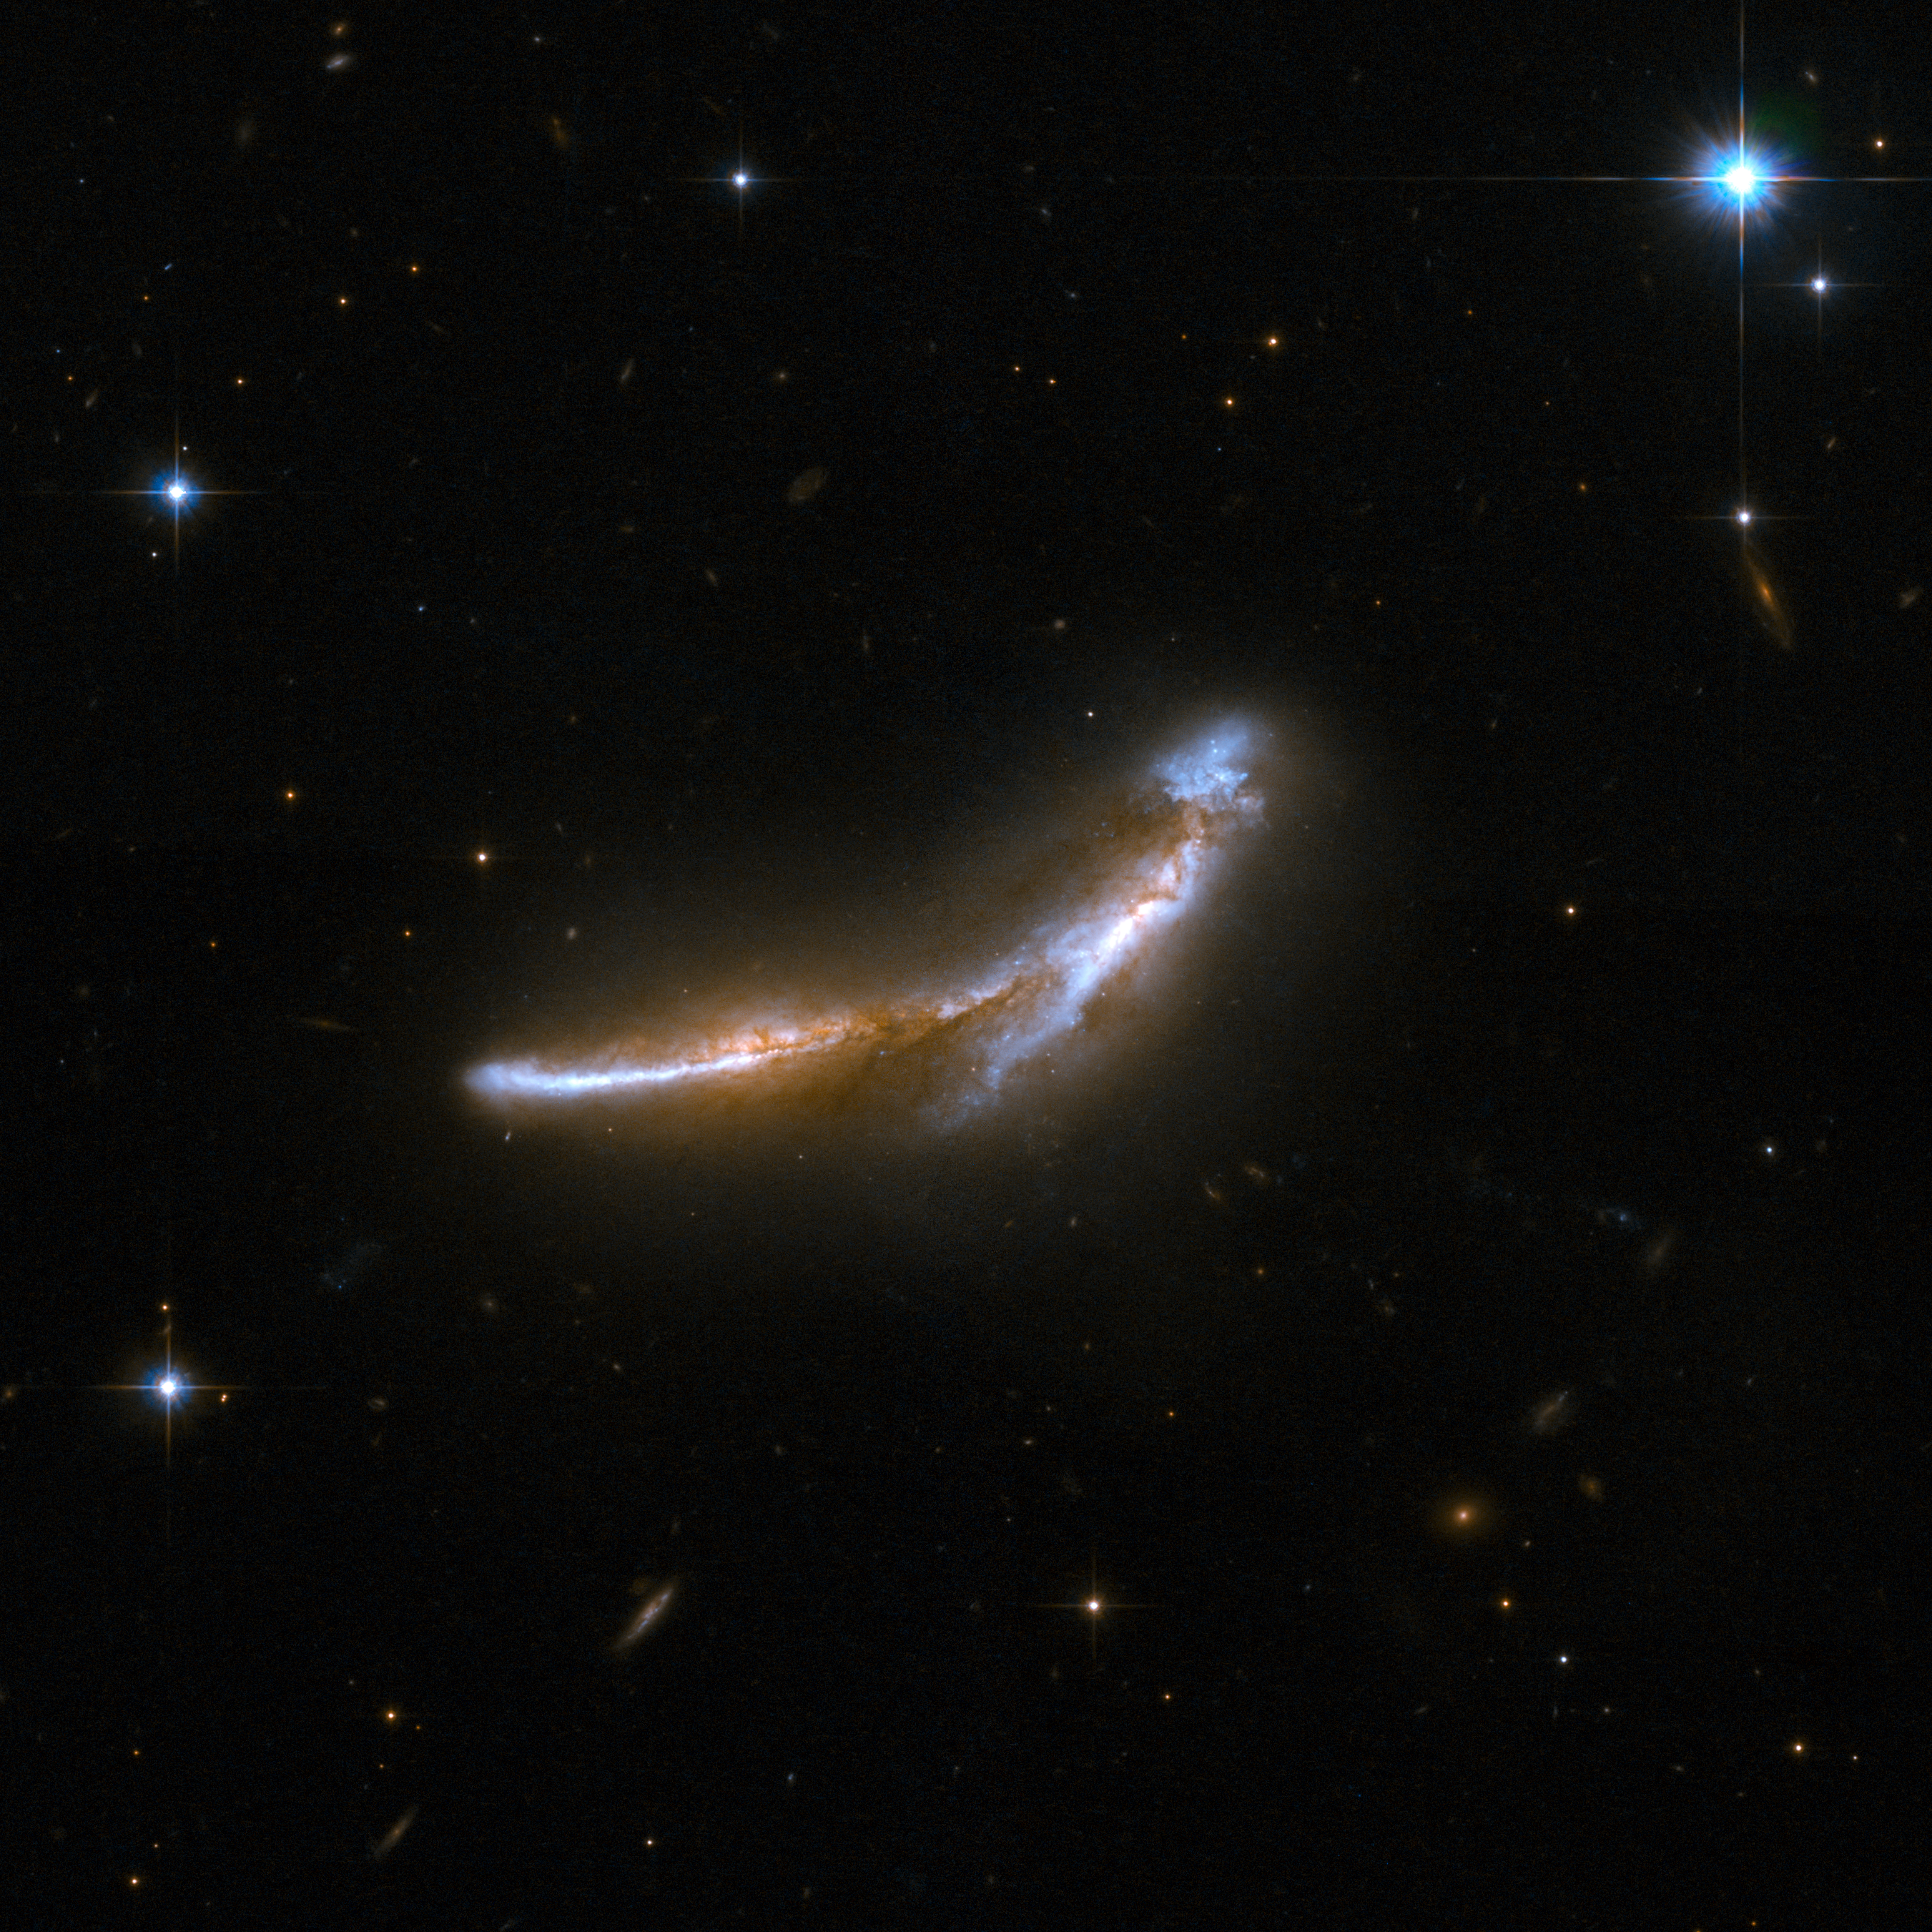

NGC 6670

NGC 6670 is a gorgeous pair of overlapping edge-on galaxies. Scientists believe that NGC 6670 has already experienced at least one close encounter and is now in the early stages of a second. The nuclei of the two galaxies are approximately 50,000 light-years apart. NGC 6670 glows in the infrared with more than a hundred billion times the luminosity of our Sun and is thought to be entering a starburst phase. The pair is located some 400 million light-years away from Earth.

This image is part of a large collection of 59 images of merging galaxies taken by the Hubble Space Telescope and released on the occasion of its 18th anniversary on 24th April 2008.

Credit: NASA, ESA, the Hubble Heritage Team (STScI/AURA)-ESA/Hubble Collaboration and A. Evans (University of Virginia, Charlottesville/NRAO/Stony Brook University)